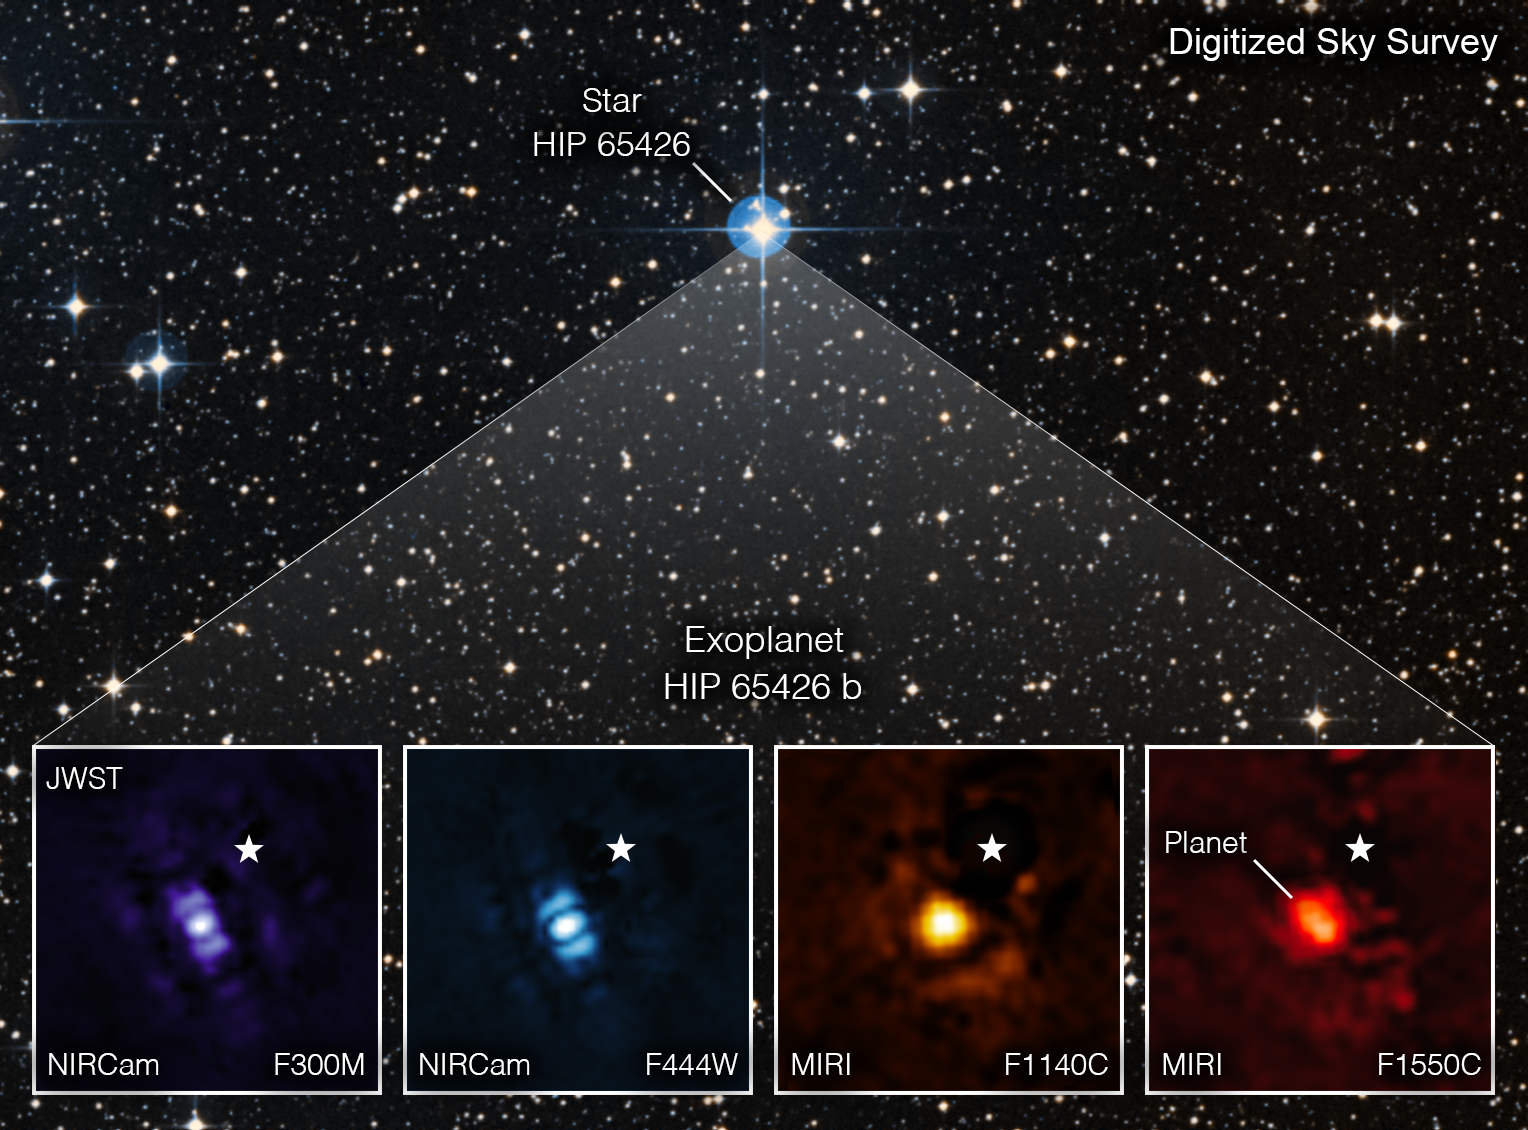

Webb Takes Its First Exoplanet Image

For the first time, astronomers have used the NASA/ESA/CSA James Webb Space Telescope to take a direct image of an exoplanet. The exoplanet is a gas giant, meaning it has no rocky surface and could not be habitable. The image, as seen through four different light filters, shows how Webb’s powerful infrared gaze can easily capture worlds beyond our solar system, pointing the way to future observations that will reveal more information than ever before about exoplanets.

The exoplanet in Webb’s image, called HIP 65426 b, is about 6 to 8 times the mass of Jupiter. It is young as planets go — about 15 to 20 million years old, compared to our 4.5-billion-year-old Earth.

Astronomers discovered the planet in 2017 using the SPHERE instrument on the European Southern Observatory’s Very Large Telescope in Chile and took images of it using short infrared wavelengths of light. The Webb image, taken in mid-infrared light, reveals new details that ground-based telescopes would not be able to detect because of the intrinsic infrared glow of Earth’s atmosphere.

Researchers have been analysing the data from these observations and are preparing a paper they will submit to journals for peer review. But Webb's first capture of an exoplanet already hints at future possibilities for studying distant worlds.

Since HIP 65426 b is about 100 times farther from its host star than Earth is from the Sun, it is sufficiently distant from the star that Webb can easily separate the planet from the star in the image.

Webb’s Near-Infrared Camera (NIRCam) and Mid-Infrared Instrument (MIRI) are both equipped with coronagraphs, which are sets of tiny masks that block out starlight, enabling Webb to take direct images of certain exoplanets like this one.

Taking direct images of exoplanets is challenging because stars are so much brighter than planets. The HIP 65426 b planet is more than 10,000 times fainter than its host star in the near-infrared, and a few thousand times fainter in the mid-infrared. While this is not the first direct image of an exoplanet taken from space – the NASA/ESA Hubble Space Telescope has captured direct exoplanet images previously – HIP 65426 b points the way forward for Webb’s exoplanet exploration.

In each filter image, the planet appears as a slightly differently shaped blob of light. That is because of the particulars of Webb’s optical system and how it translates light through the different optics. Purple shows the NIRCam instrument’s view at 3.00 micrometers, blue shows the NIRCam instrument’s view at 4.44 micrometers, yellow shows the MIRI instrument’s view at 11.4 micrometers, and red shows the MIRI instrument’s view at 15.5 micrometers. These images look different because of the ways that the different Webb instruments capture light. The small white star in each image marks the location of the host star HIP 65426, which has been subtracted using the coronagraphs and image processing. The bar shapes in the NIRCam images are artifacts of the telescope’s optics, not objects in the scene.

These observations were lead with a large international collaboration by Sasha Hinkley, associate professor of physics and astronomy at the University of Exeter in the United Kingdom.

Note: This image highlights Webb’s science in progress, which has not yet been through the peer-review process.

Credit: NASA/ESA/CSA, A Carter (UCSC), the ERS 1386 team, and A. Pagan (STScI)